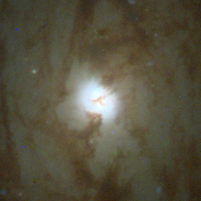

The Whirlpool Galaxy

The galaxy's massive center, the bright ball of light in the center of the photograph, is about 80 light-years across and has a brightness of about 100 million suns. Astronomers estimate that it is about 400 million years old and has a mass 40 million times larger than our Sun.

Credit: Nino Panagia ( Space Telescope Science Institute and European Space Agency) and NASA